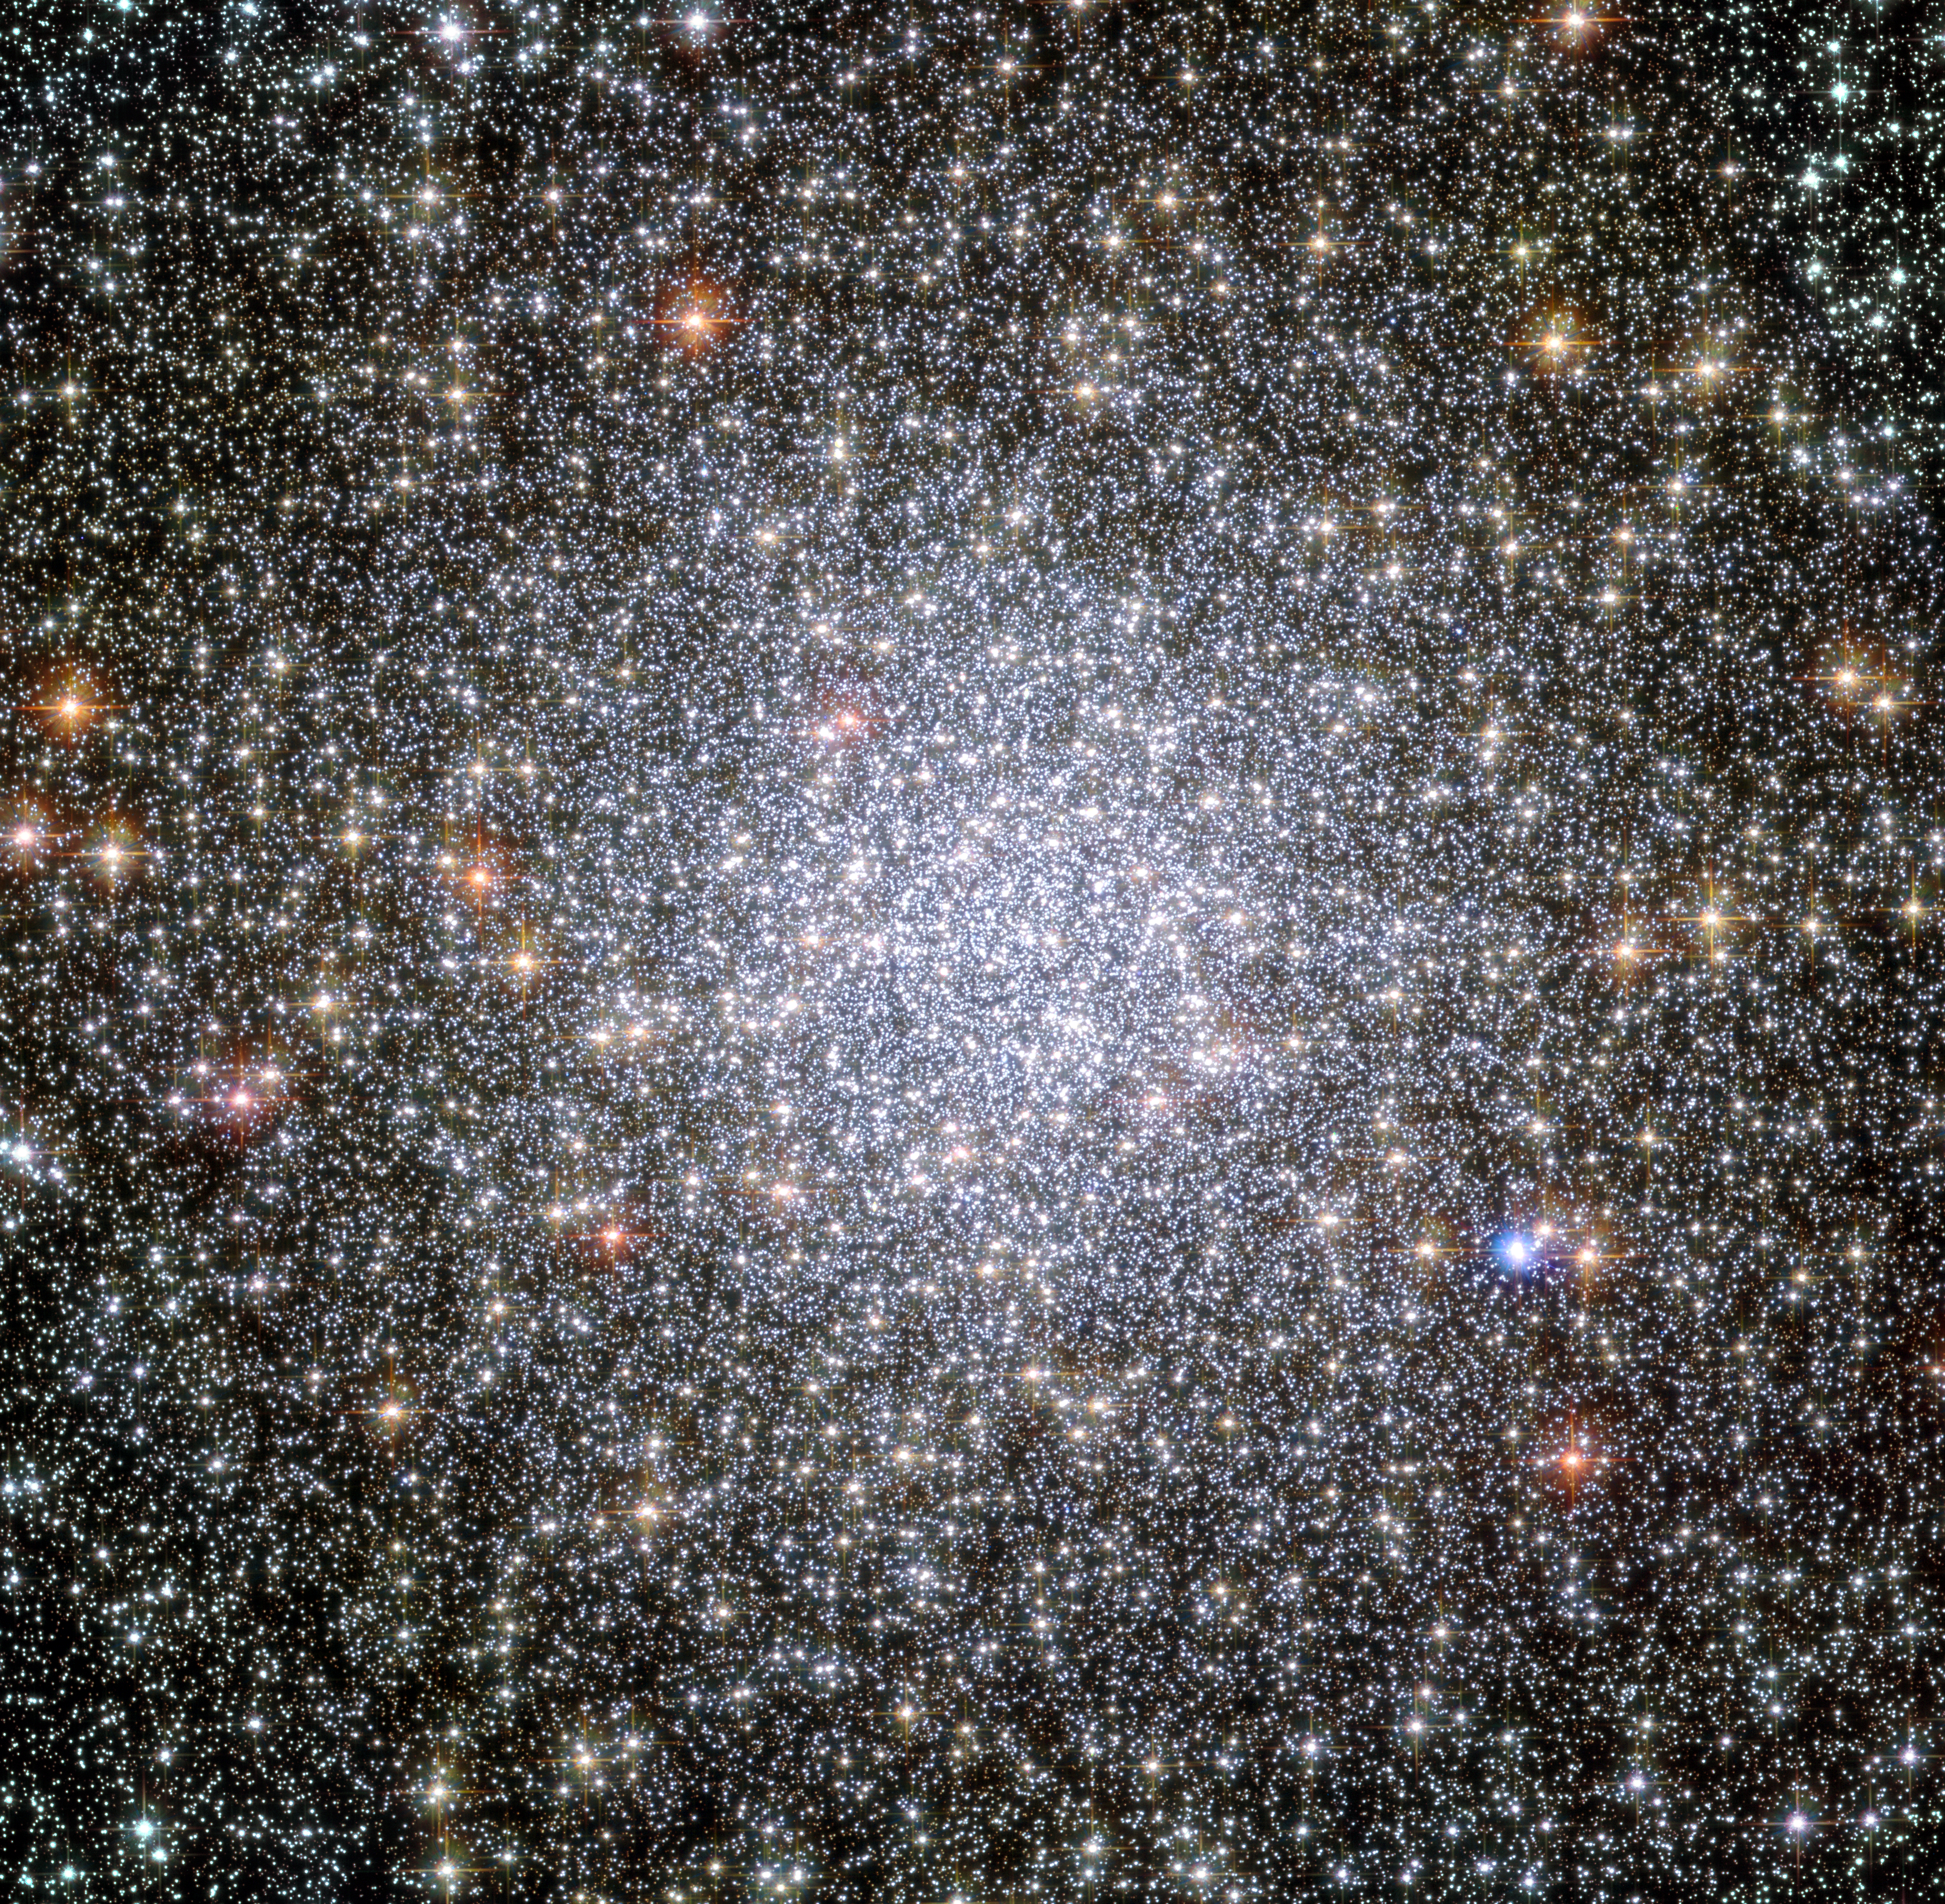

Globular cluster 47 Tucanae

This NASA/ESA Hubble Space Telescope image shows a globular cluster known as NGC 104 — or, more commonly, 47 Tucanae, since it is part of the constellation of Tucana (The Toucan) in the southern sky. After Omega Centauri it is the brightest globular cluster in the night sky, hosting tens of thousands of stars.

Scientists using Hubble observed the white dwarfs in the cluster. These dying stars migrate from the crowded centre of the cluster to its outskirts. Whilst astronomers knew about this process they had never seen it in action, until the detailed study of 47 Tucanae.

Credit: NASA, ESA, and the Hubble Heritage (STScI/AURA)-ESA/Hubble Collaboration Acknowledgment: J. Mack (STScI) and G. Piotto (University of Padova, Italy)